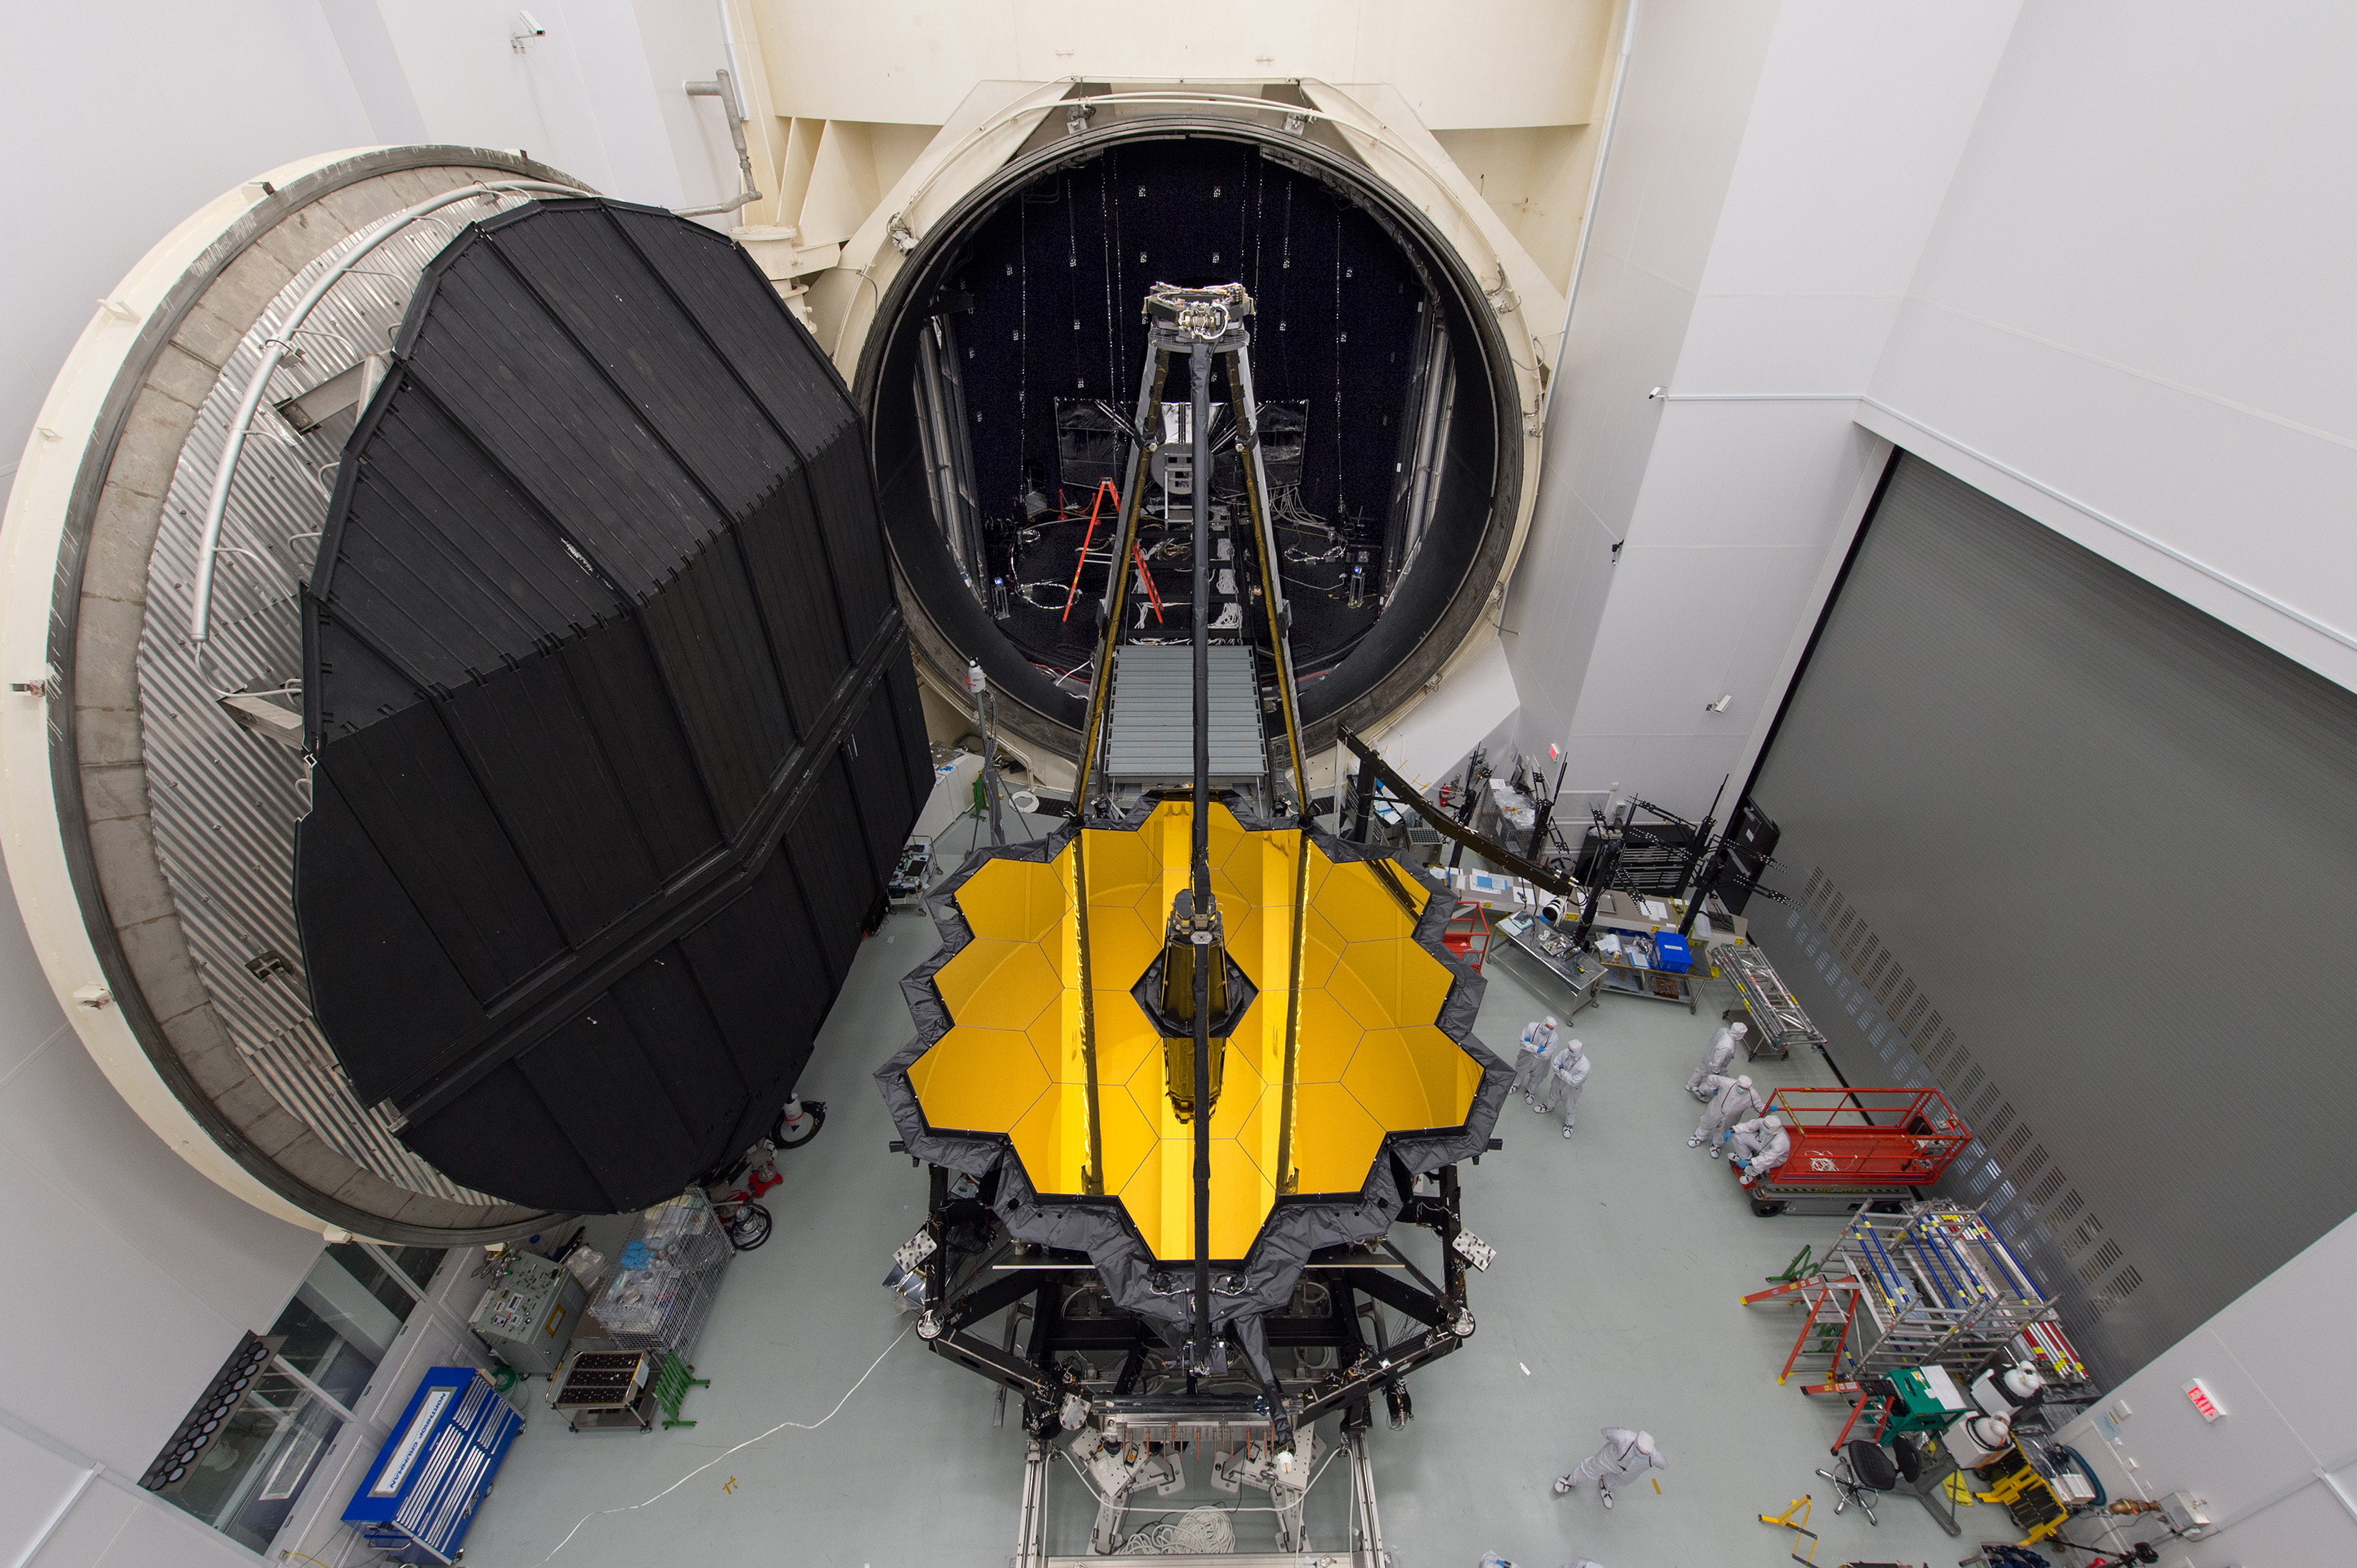

JWST OTIS set for testing in space simulation chamber

The combined Optical Telescope element / Integrated Science instrument module (OTIS) of the James Webb Space Telescope sits in front of the door to Chamber A, a giant thermal vacuum chamber located at NASA's Johnson Space Center.

Credit: NASA/Desiree Stover